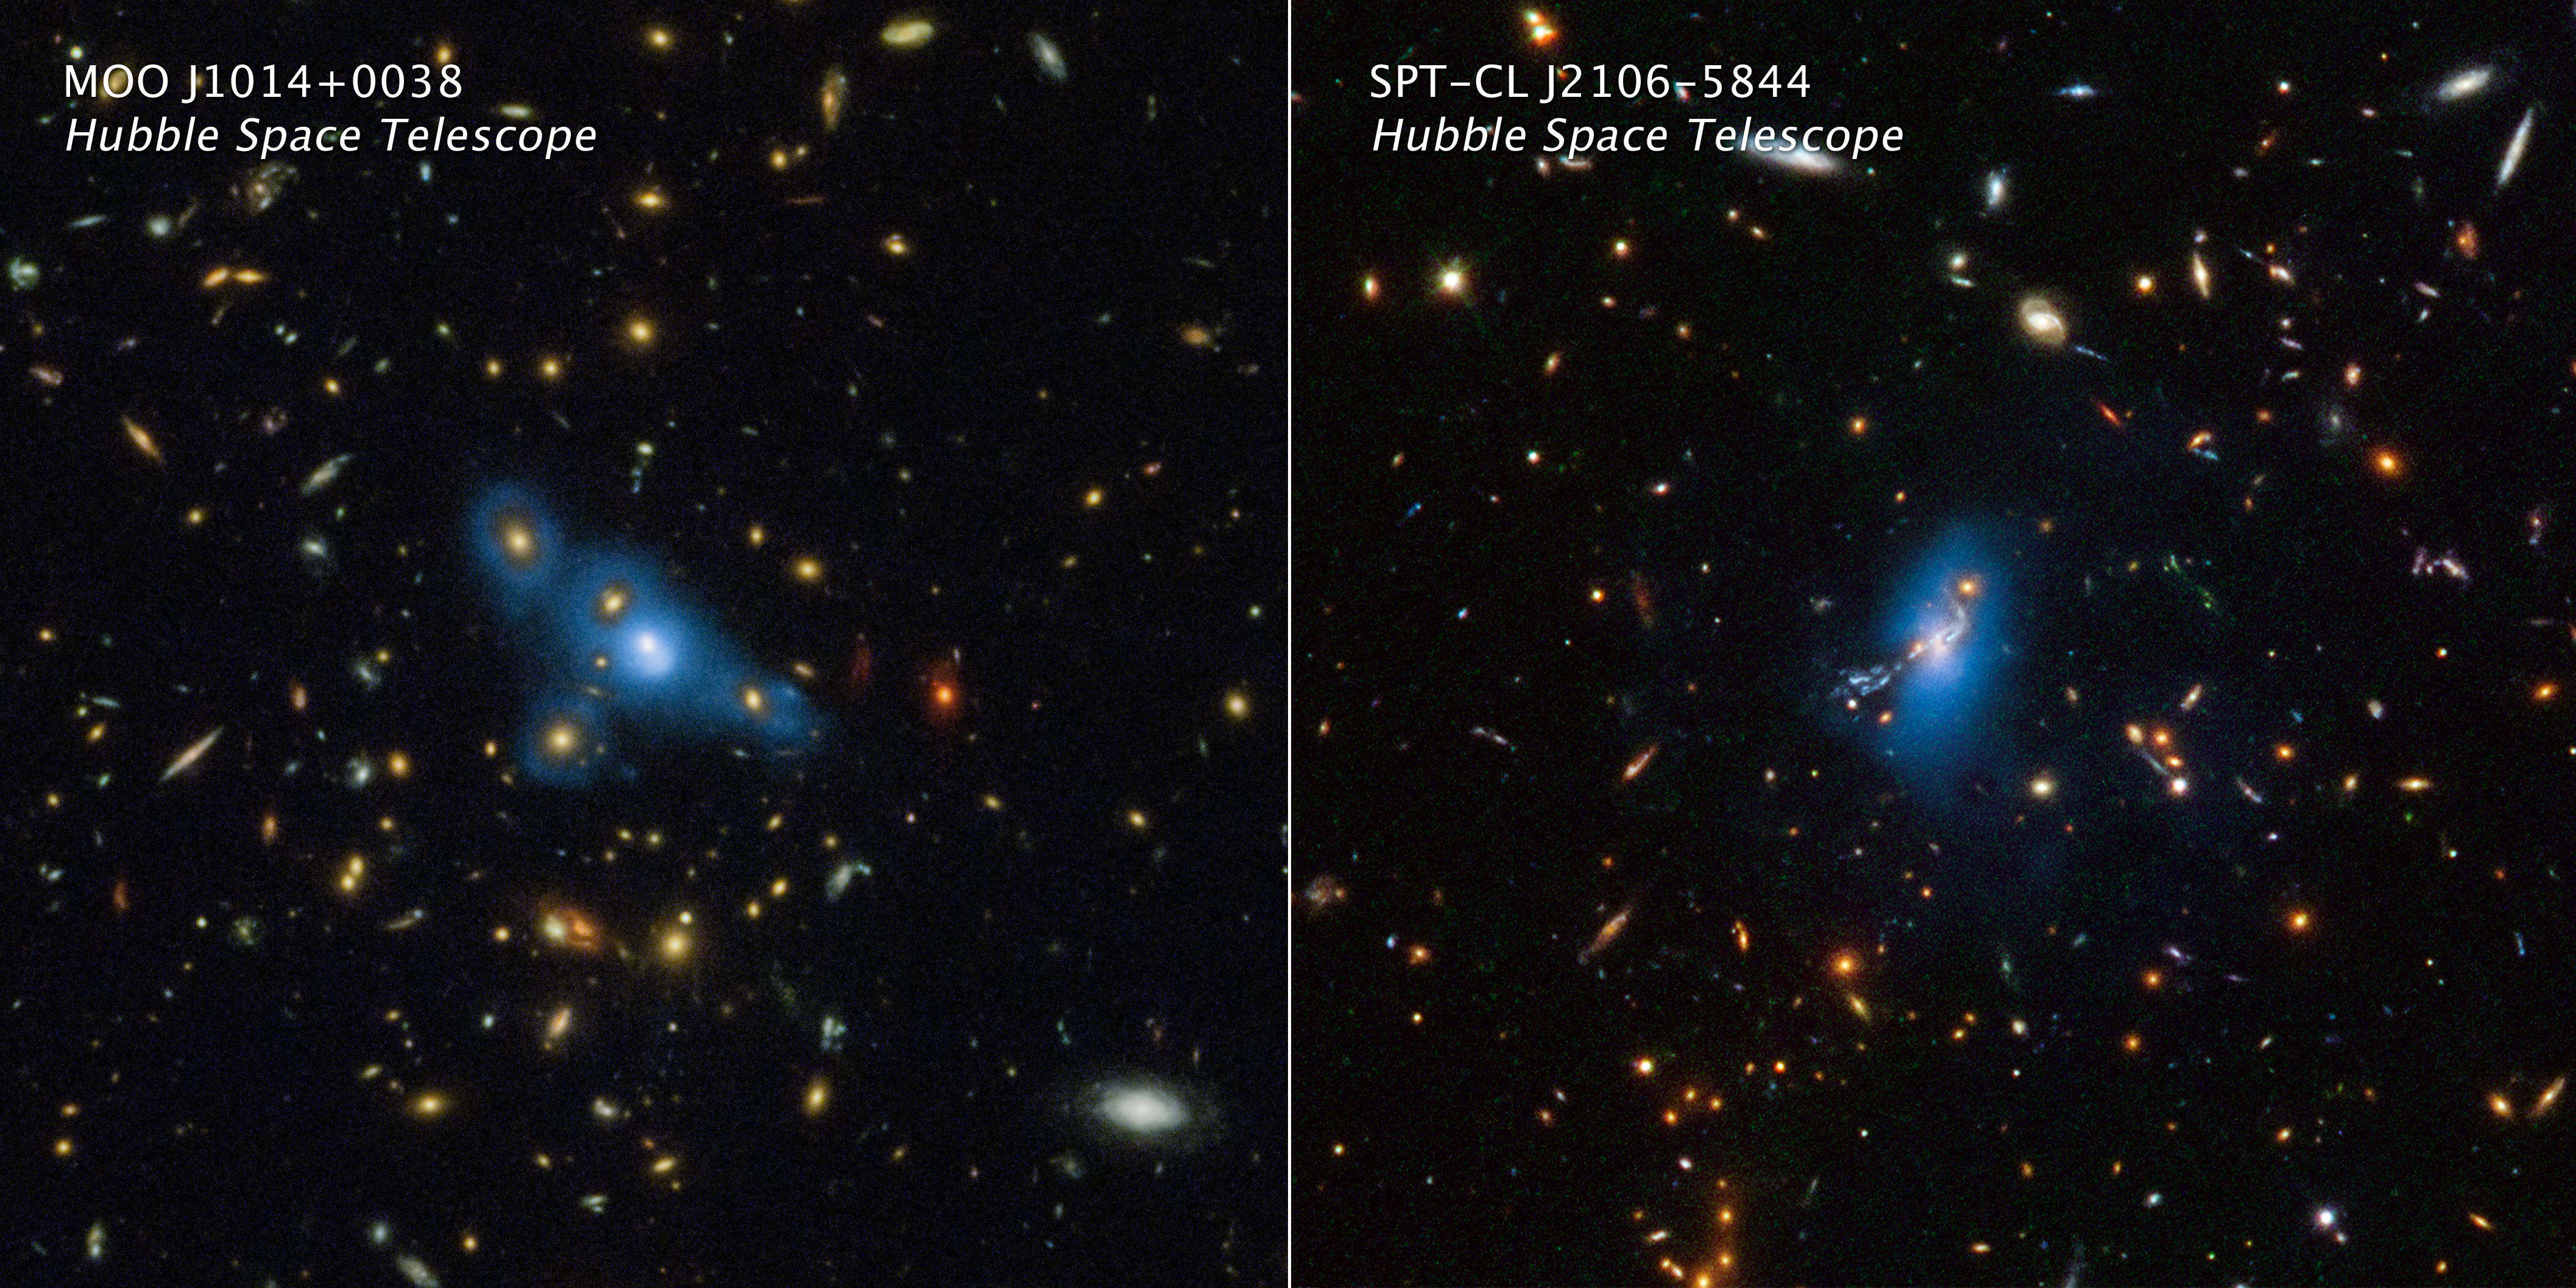

Hubble Finds That Ghost Light Among Galaxies Stretches Far Back In Time

In giant clusters of hundreds or thousands of galaxies, innumerable stars wander among the galaxies like lost souls, emitting a ghostly haze of light. These stars are not gravitationally tied to any one galaxy in a cluster. How did the stars get so scattered throughout the cluster in the first place? Several competing theories include the possibility that the stars were stripped out of a cluster's galaxies, or they were tossed around after mergers of galaxies, or they were present early in a cluster's formative years many billions of years ago. A recent infrared survey from the NASA/ESA Hubble Space Telescope, which looked for this so-called "intracluster light" sheds new light on the mystery. The new Hubble observations suggest that these stars have been wandering around for billions of years, and are not a product of more recent dynamical activity inside a galaxy cluster that would strip them out of normal galaxies.

The survey included 10 galaxy clusters as far away as nearly 10 billion light-years. These measurements must be made from space because the faint intracluster light is 10,000 times dimmer than the night sky as seen from the ground. The survey reveals that the fraction of the intracluster light relative to the total light in the cluster remains constant, looking over billions of years back into time. This means that these stars were already homeless in the early stages of the cluster's formation.

Shown here are Hubble Space Telescope images of two massive clusters of galaxies named MOO J1014+0038 (left panel) and SPT-CL J2106-5844 (right panel). The artificially added blue color is translated from Hubble data that captured a phenomenon called intracluster light. This extremely faint glow traces a smooth distribution of light from wandering stars scattered across the cluster. Billions of years ago the stars were shed from their parent galaxies and now drift through intergalactic space.

The NASA/ESA/CSA James Webb Space Telescope’s near-infrared capability and sensitivity will greatly extend the search for intracluster stars deeper into the Universe, and therefore should help solve the mystery.

Credit: NASA, ESA, STScI, James Jee (Yonsei University), Joseph DePasquale (STScI)